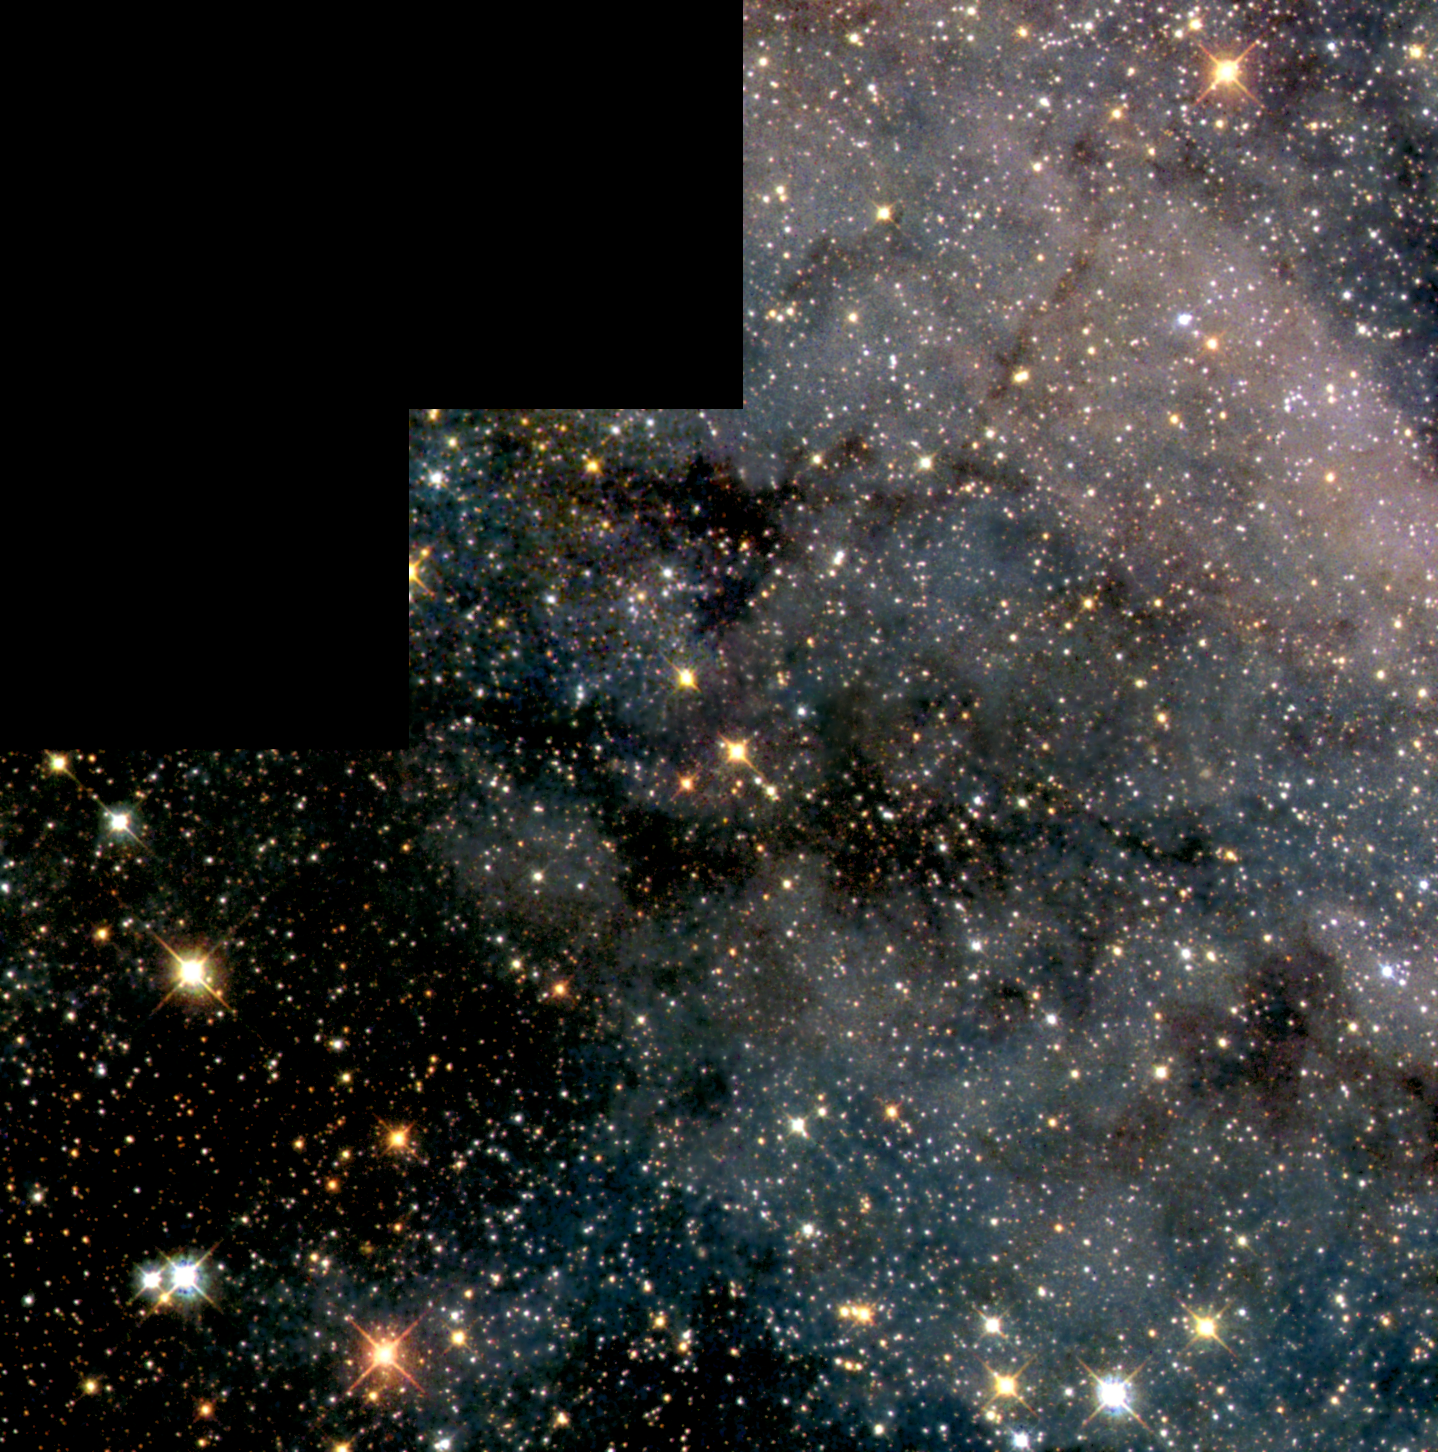

Swarm of Glittering Stars in the Large Magellanic Cloud

The NASA/ESA Hubble Space Telescope has peered at a small area within the Large Magellanic Cloud (LMC) to provide the deepest colour picture ever obtained in that satellite galaxy of our own Milky Way.

Credit: NASA/ESA and The Hubble Heritage Team (STScI)